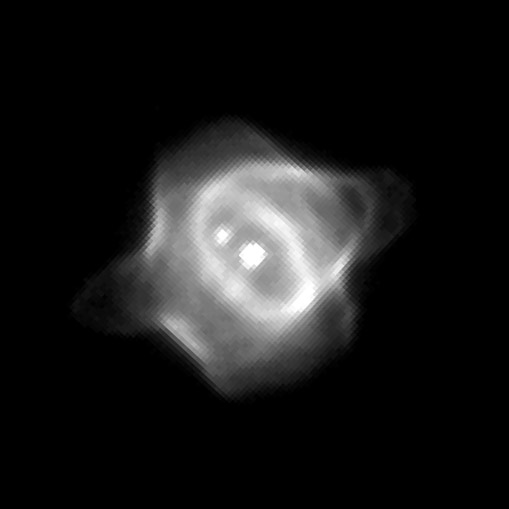

Hubble captures unveiling of planetary Nebula

This Wide Field and Planetary Camera 2image captures the infancy of the Stingray nebula (Hen-1357), the youngest known planetary nebula.

In this image, the bright central star is in the middle of the green ring of gas. Its companion star is diagonally above it at 10 o'clock. A spur of gas (green) is forming a faint bridge to the companion star due to gravitational attraction.

Credit: Matt Bobrowsky (Orbital Sciences Corporation) and NASA/ESA